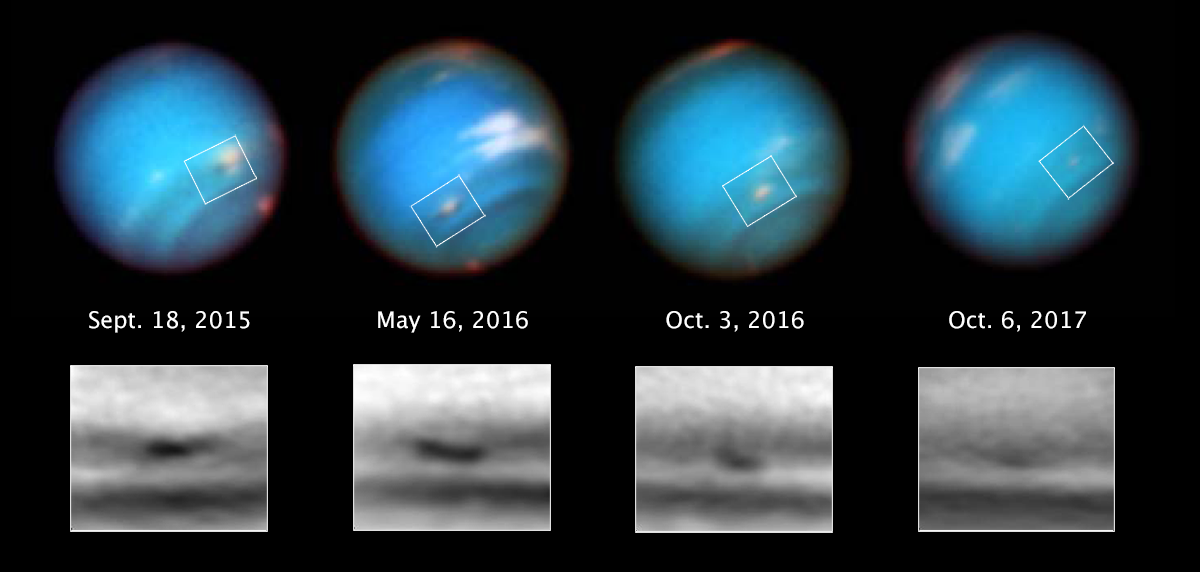

Neptune’s shrinking vortex

Neptune, the eighth and farthest planet from the Sun, was visited for the first and last time by NASA’s Voyager 2 mission in 1989. Since then, the NASA/ESA Hubble Space Telescope has been attempting to unearth the myriad mysteries surrounding this cool, majestic behemoth — including deciphering why it has the fastest wind speeds of any planet in the Solar System, and what lies at its centre.

These new Hubble images reveal one of the standout features of Neptune’s strange atmosphere: a rare dark spot, or dark vortex — a whirling high-pressure atmospheric system usually accompanied by bright “companion clouds”. This particular dark spot is named SDS-2015 (Southern Dark Spot discovered in 2015), and is only the fifth observed so far on Neptune. Although it appears to be slightly smaller than previous dark spots, observations of SDS-2015 from 2015 to 2017 revealed that the spot was once big enough to almost swallow China before rapidly diminishing in size.

Each of the five dark spots found on Neptune have been curiously diverse, but all have appeared and disappeared within just a few years — as opposed to similar vortices on Jupiter which evolve over decades. Bright clouds form alongside dark spots when the flow of ambient air is disturbed and diverted upwards over the spot, likely causing gases to freeze into methane ice crystals.

Only Hubble is currently powerful enough to image Neptune’s dark spots, and produce striking images such as these; these views were taken over the course of two years using Hubble’s Wide Field Camera 3 (WFC3).

Credit: NASA, ESA, and M.H. Wong and A.I. Hsu (UC Berkeley)